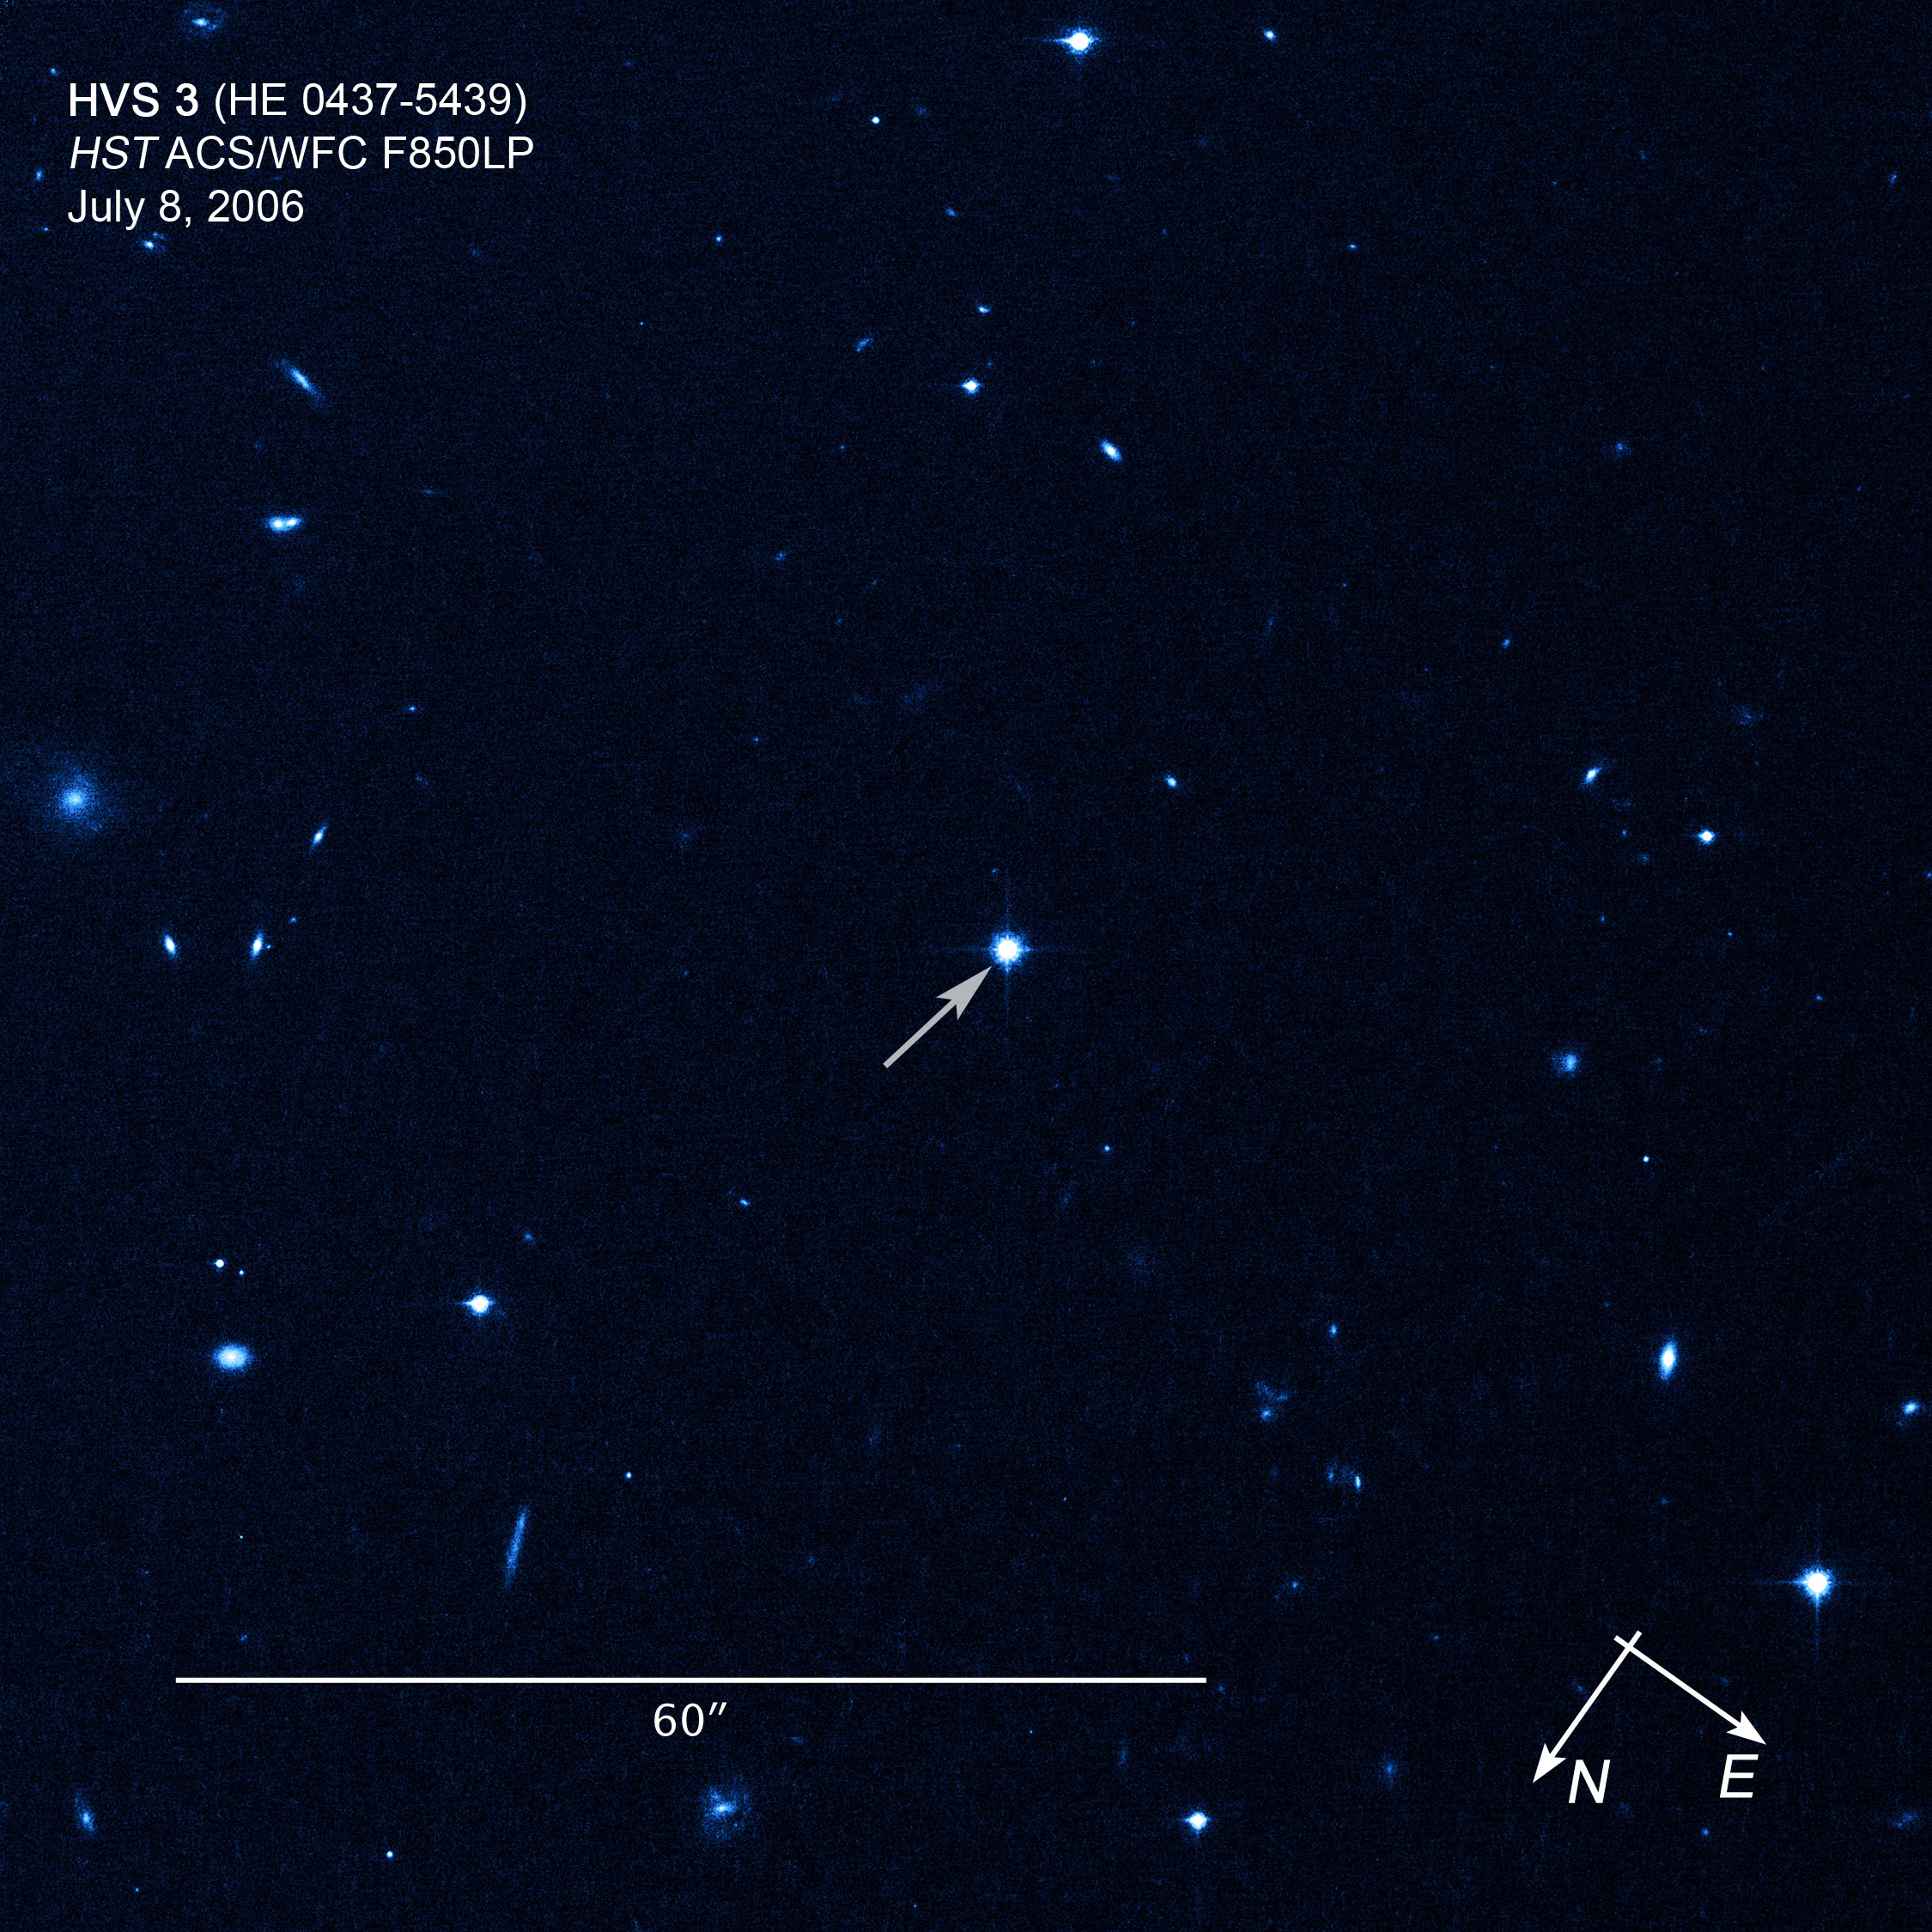

Compass/scale image of hypervelocity star HE 0437-5439

Compass/scale image of hypervelocity star HE 0437-5439.

Credit: NASA, ESA, and Z. Levay (STScI). Science Credit: NASA, ESA, O. Gnedin (University of Michigan, Ann Arbor, USA), and W. Brown (Harvard-Smithsonian Center for Astrophysics, Cambridge, Mass., USA)